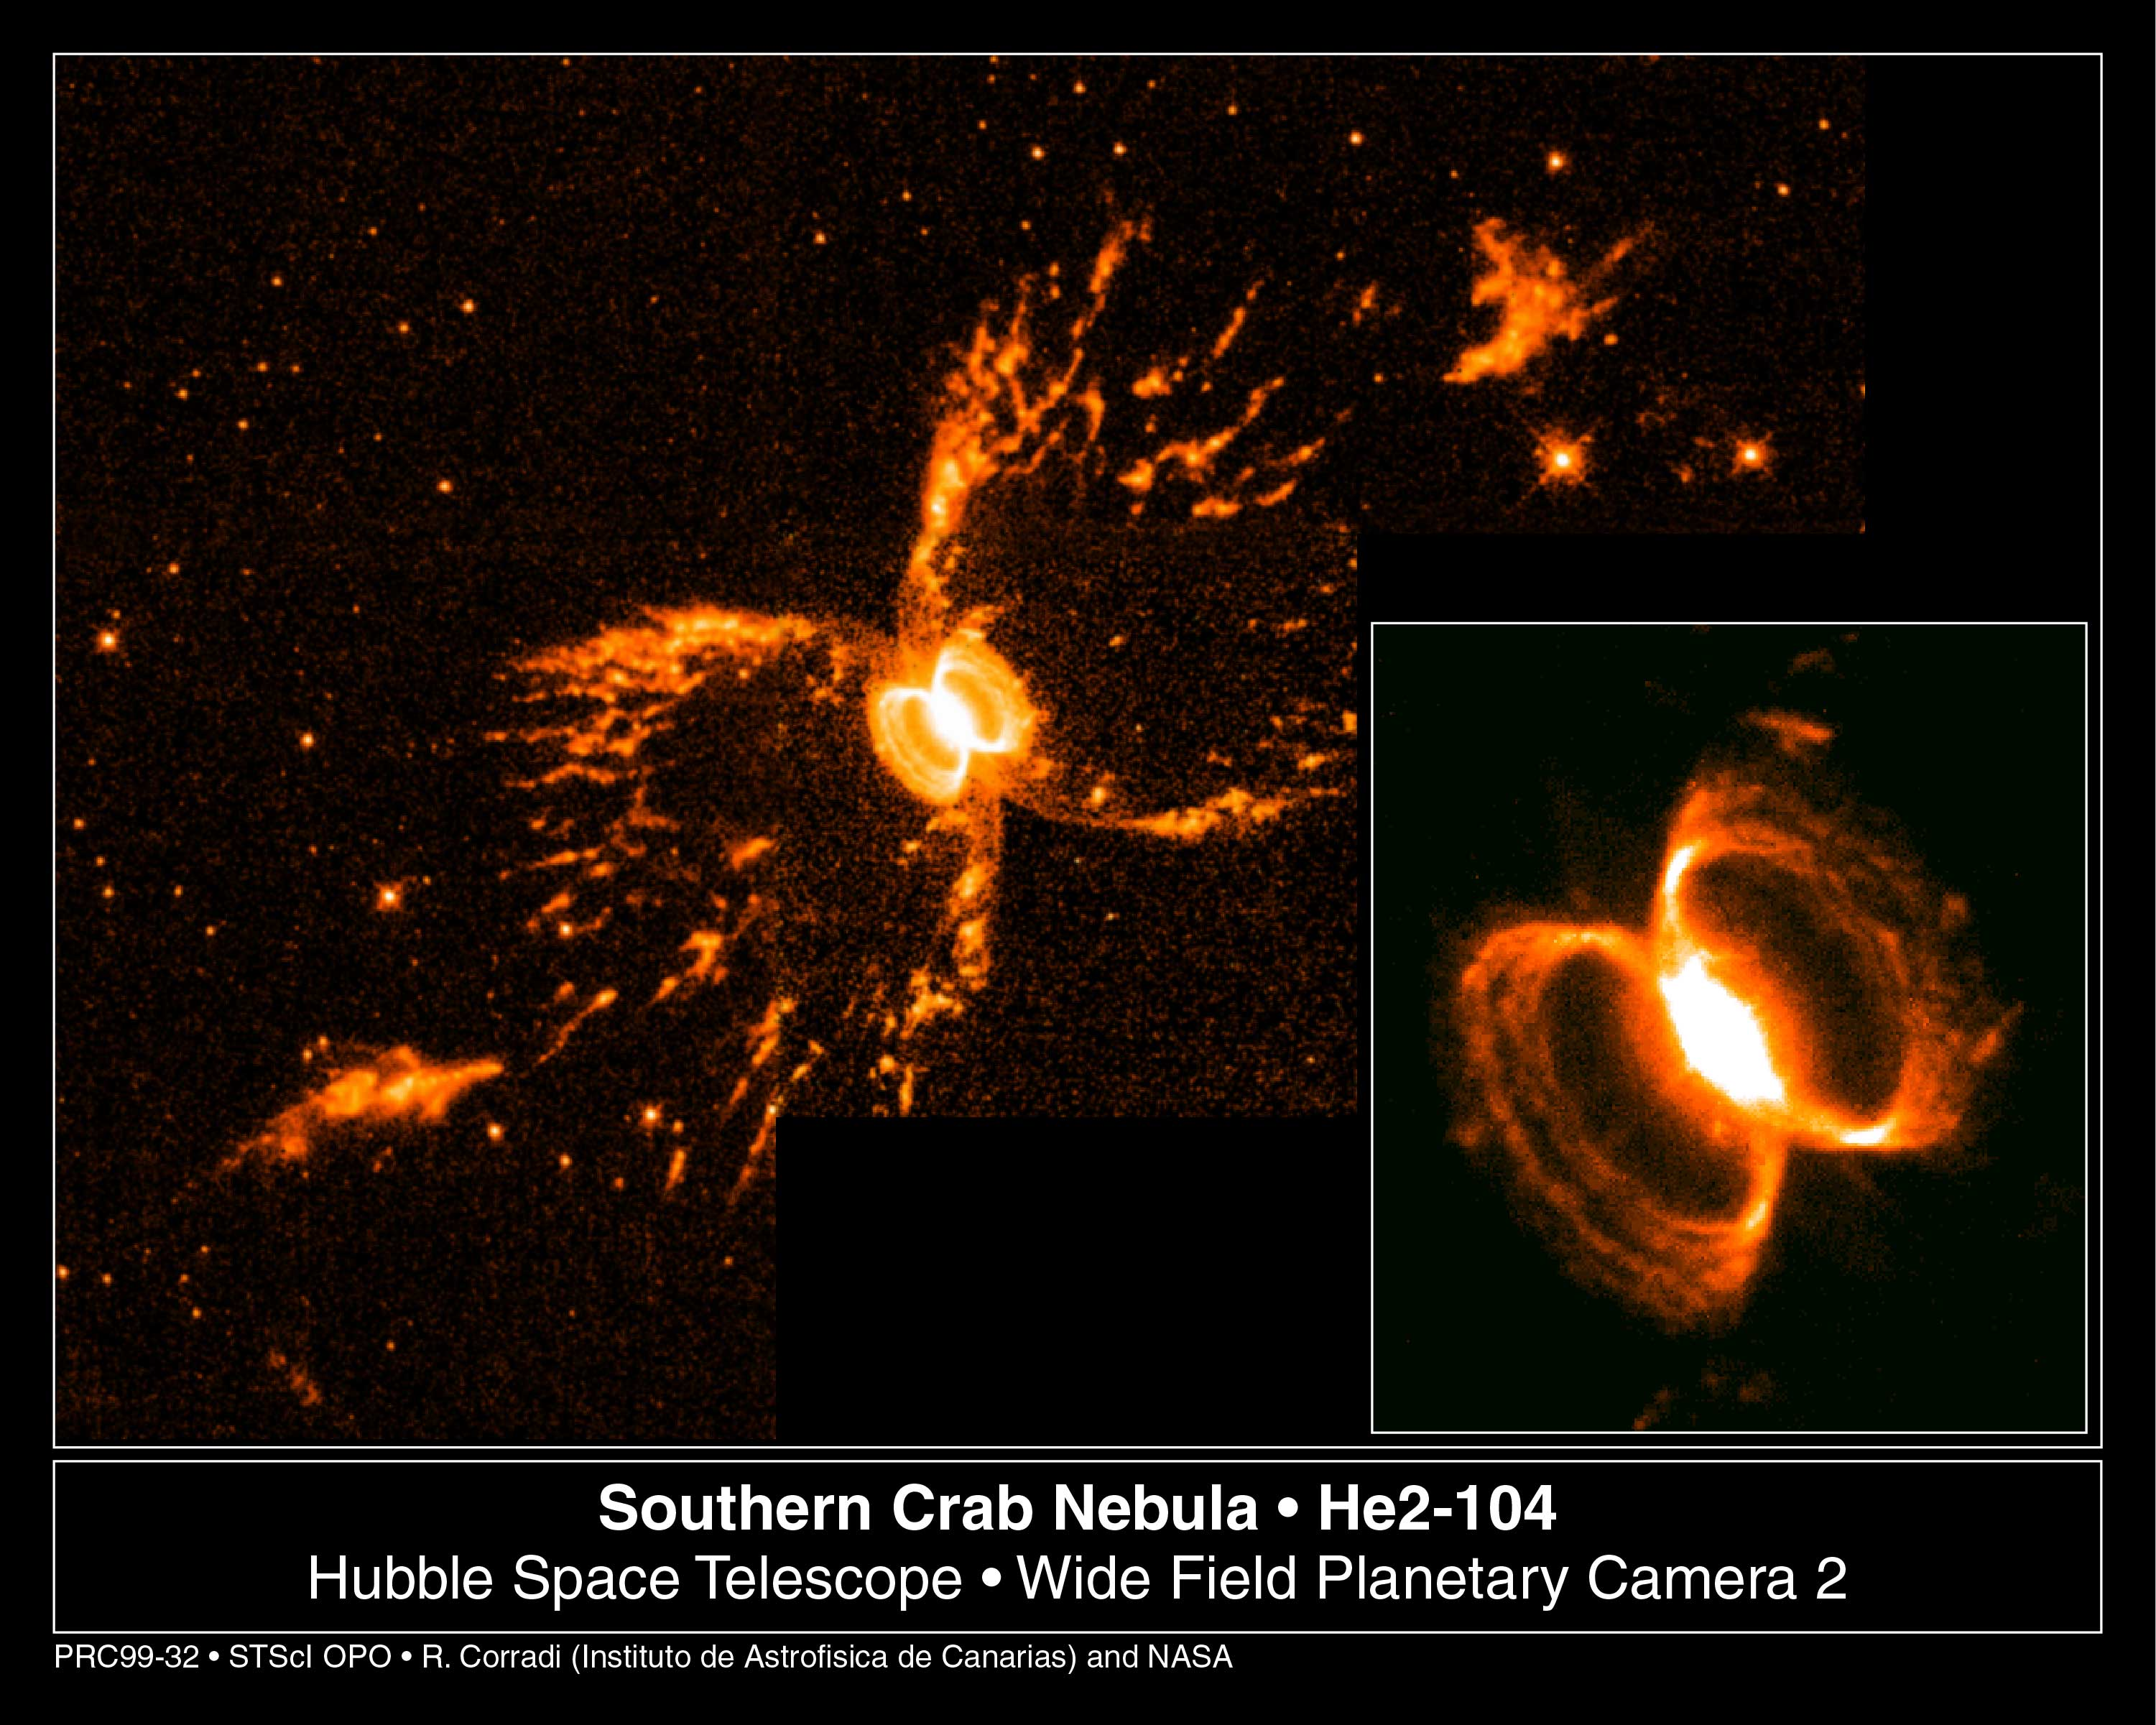

Southern Crab Nebula

A tempestuous relationship between an unlikely pair of stars may have created an oddly shaped, gaseous nebula that resembles an hourglass nestled within an hourglass.

The possible creators of these shapes cannot be seen at all in this Wide Field and Planetary Camera 2image. It's a pair of aging stars buried in the glow of the tiny, central nebula.

Credit: Romano Corradi, Instituto de Astrofisica de Canarias, Tenerife, Spain; Mario Livio, Space Telescope Science Institute, Baltimore, Md.; Ulisse Munari, Osservatorio Astronomico di Padova-Asiago, Italy; HugoSchwarz, Nordic Optical Telescope, Canarias, Spain; and NASA/ESA